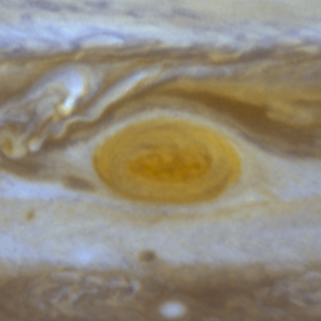

Jupiter's Great Red Spot

When 17th-century astronomers first turned their telescopes to Jupiter, they noted a conspicuous reddish spot on the giant planet. This Great Red Spot is still present in Jupiter's atmosphere, more than 300 years later. It is now known that it is a vast storm, spinning like a cyclone. Unlike a low-pressure hurricane in the Caribbean Sea, however, the Red Spot rotates in a counterclockwise direction in the southern hemisphere, showing that it is a high-pressure system. Winds inside this Jovian storm reach speeds of about 270 mph.

Credit: Hubble Heritage Team (STScI/AURA/NASA/ESA) and Amy Simon (Cornell U.)